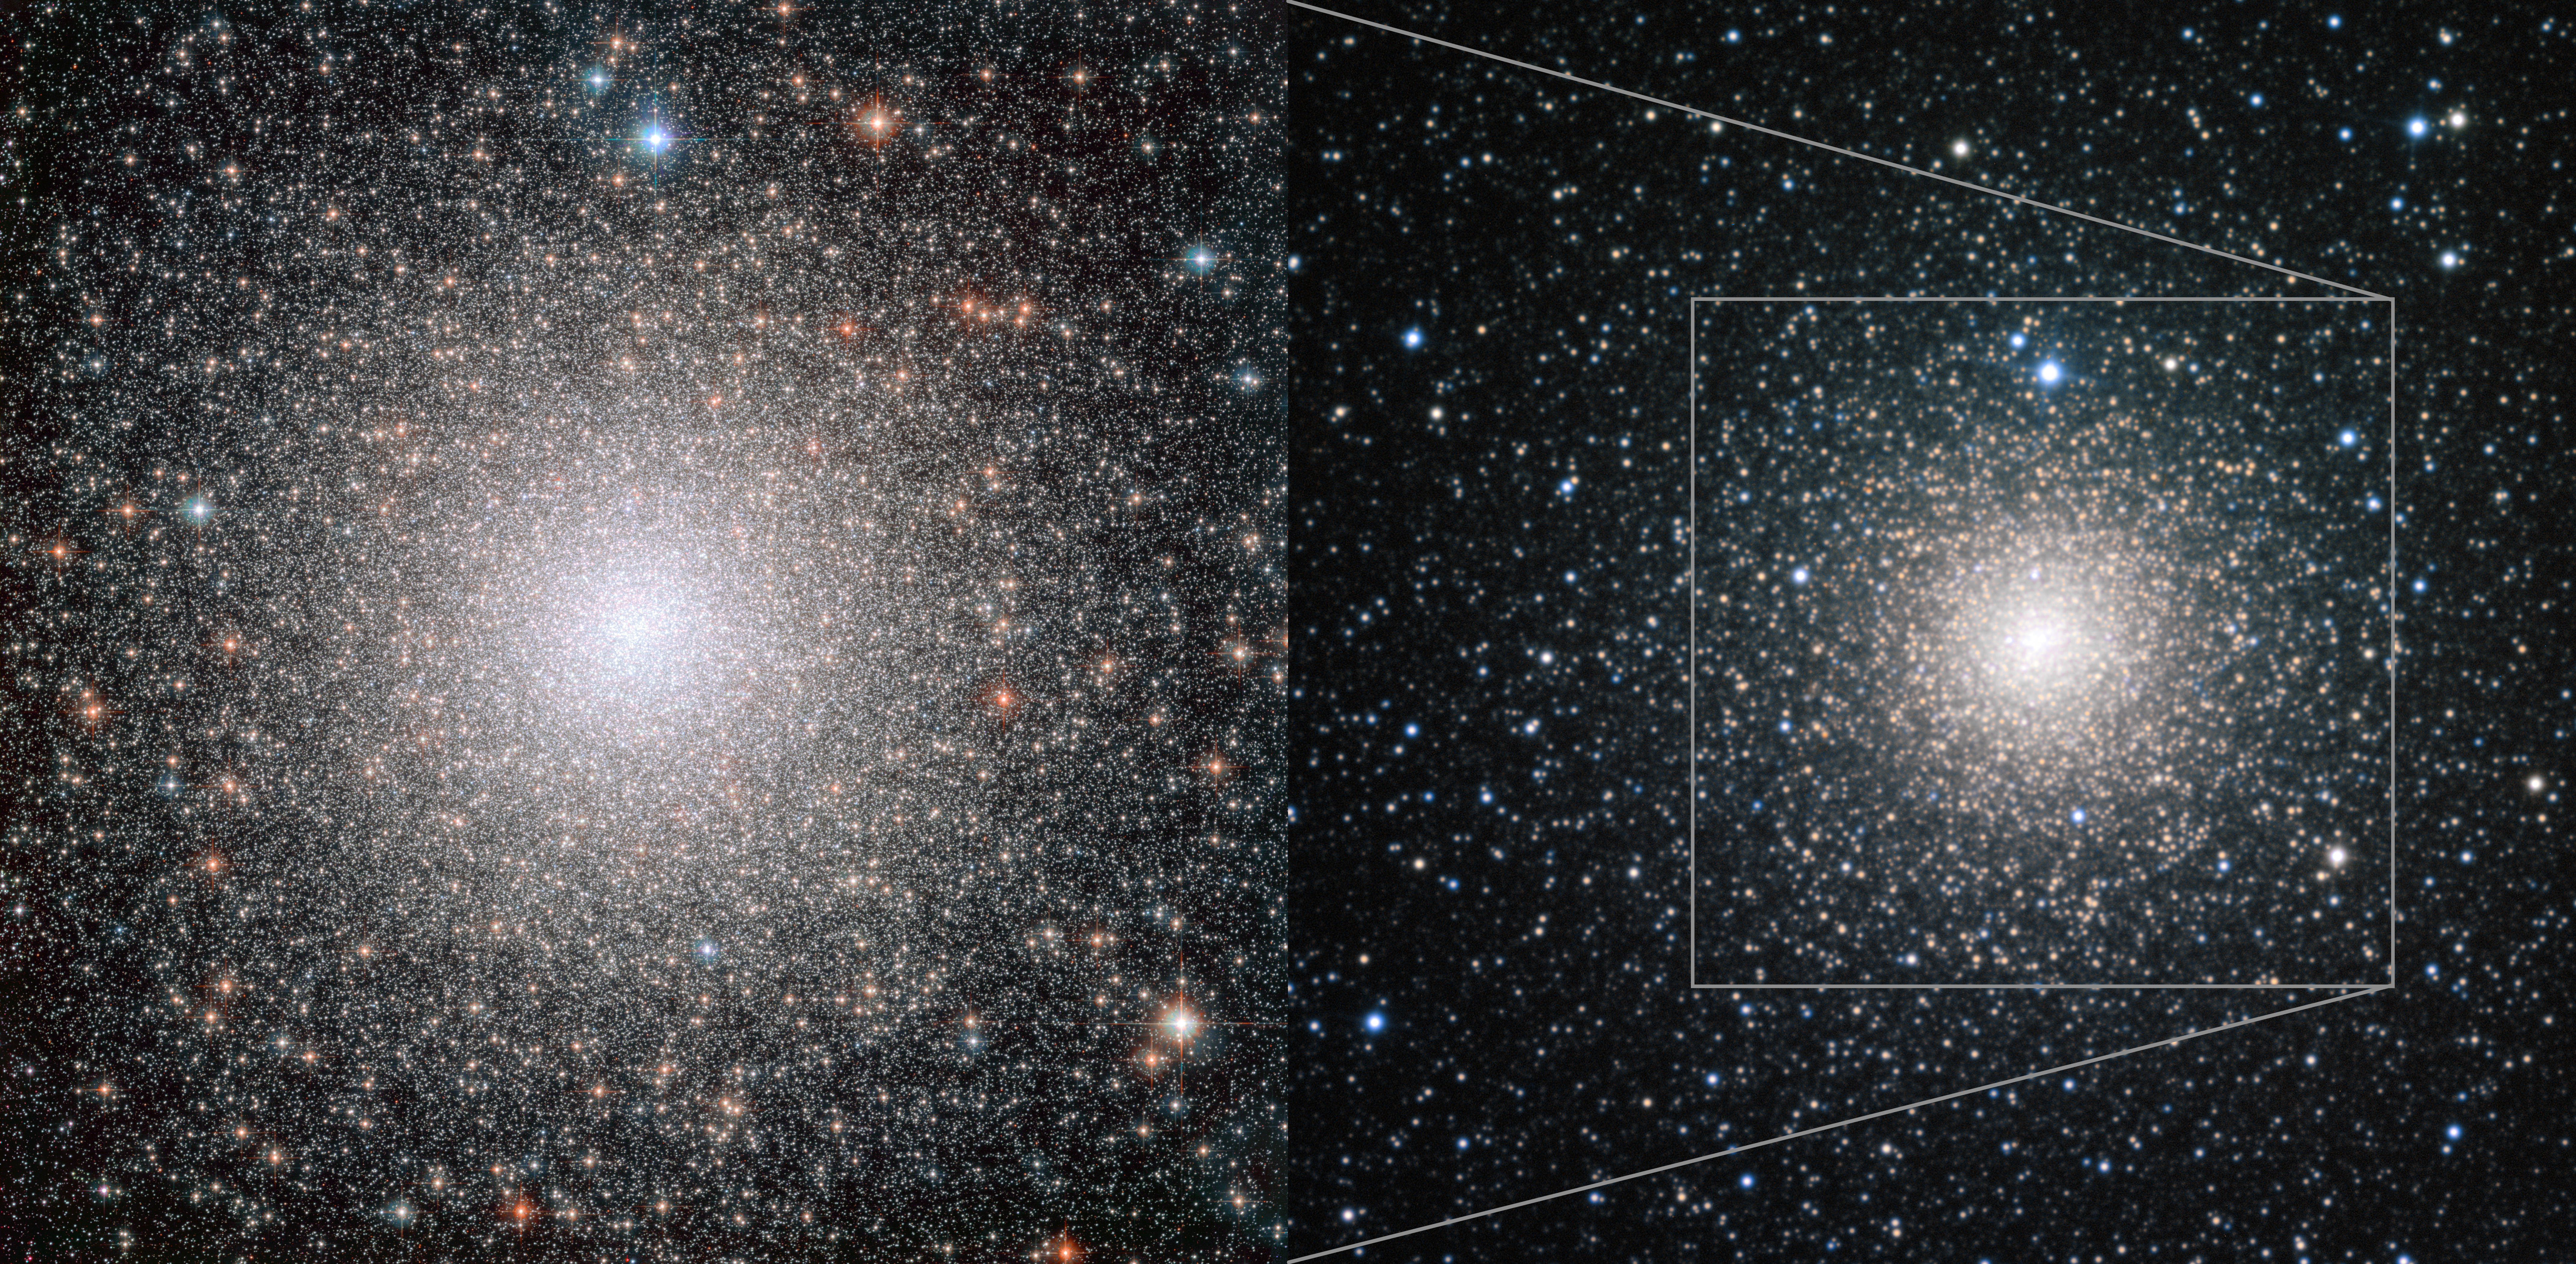

NGC 6388 seen by Hubble and ESO

This image shows Hubble and ESO observations of globular cluster NGC 6388. Hubble provides a more detailed image which allows scientists to resolve stars right to the centre of the cluster, while the image from the MPG/ESO 2.2-metre telescope gives a wider view which encompasses the cluster’s outer regions.

Credit: NASA, ESA, ESO, F. Ferraro (University of Bologna)